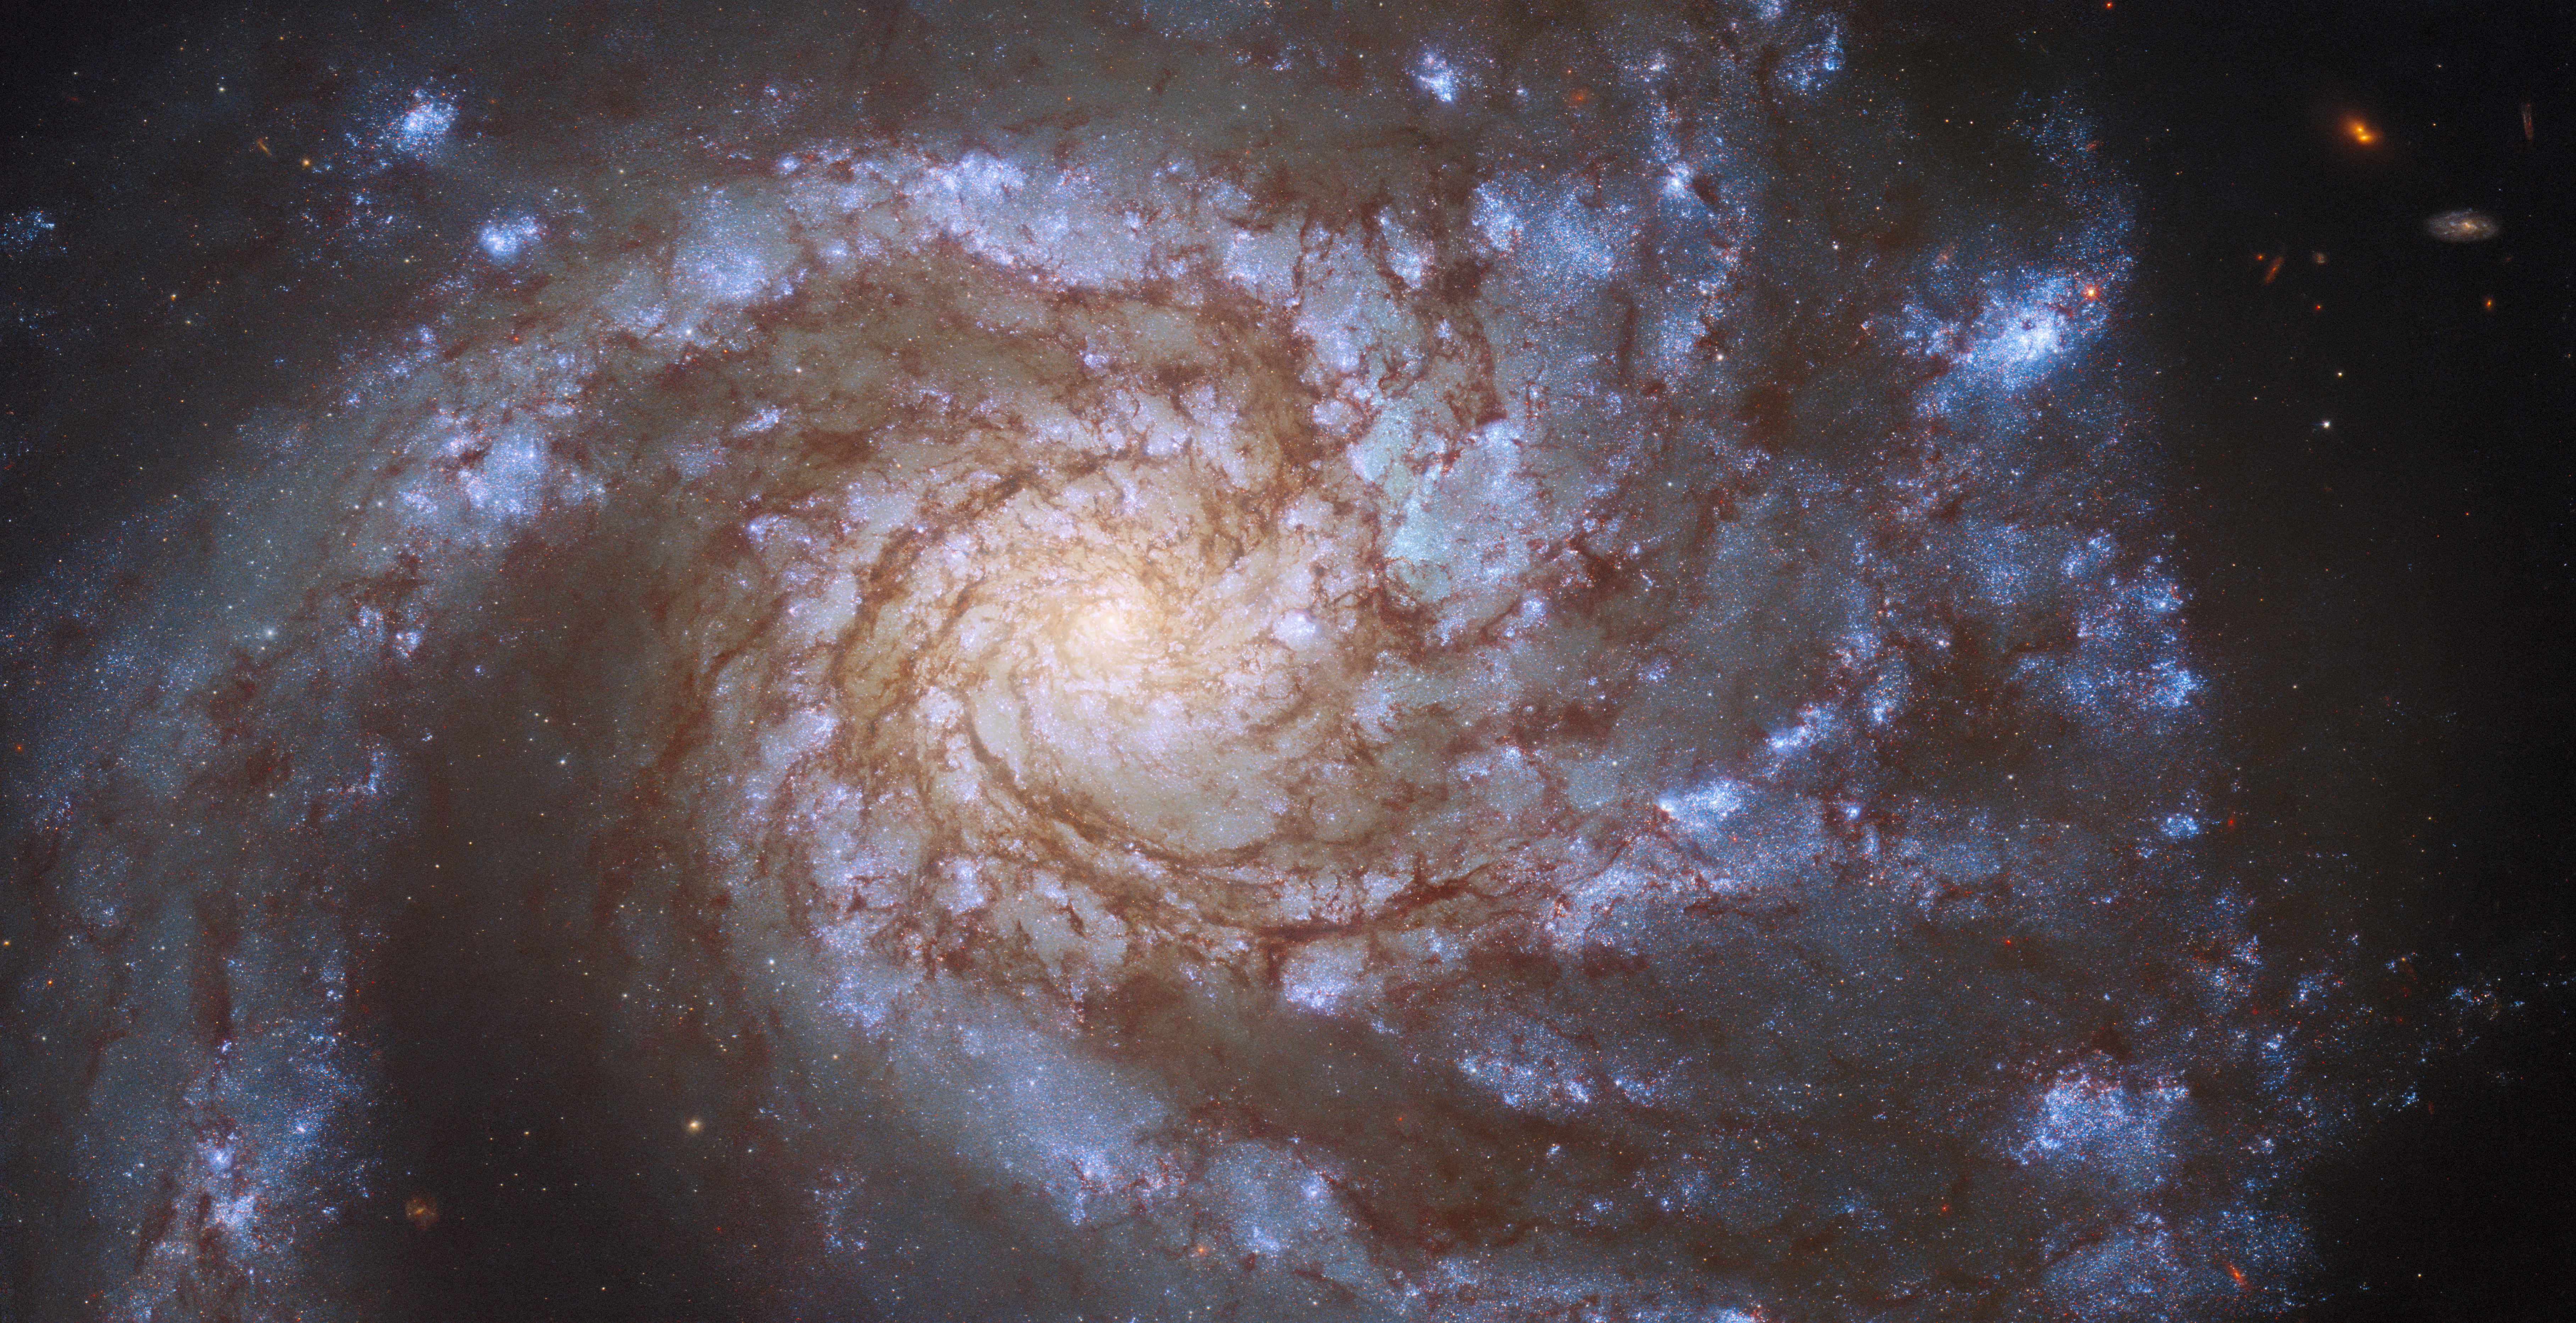

Hubble Sees Double in M99

The magnificent spiral galaxy M99 fills the frame in this image from the NASA/ESA Hubble Space Telescope. M99 — which lies roughly 42 million light-years from Earth in the constellation Coma Berenices — is a “grand design” spiral galaxy, so-called because of the well-defined, prominent spiral arms visible in this image. M99 was captured by Hubble’s Wide Field Camera 3 on two separate occasions, helping astronomers study two entirely different astronomical phenomena.

The first set of observations aimed to explore a gap between two different varieties of cosmic explosions; novae and supernovae. Novae, which are caused by the interactions between white dwarfs and larger stars in binary systems, are far less bright than the supernovae which mark the catastrophically violent deaths of massive stars. However, current astronomical theories predict that sudden, fleeting events could occur that shine with brightnesses between those of novae and supernovae. Despite being described by astronomers as being shrouded in mystery and controversy, just such an event was observed in M99. Astronomers turned to Hubble’s keen vision to take a closer look and precisely locate the fading source.

The second set of observations were part of a large Hubble project which aims to chart the connections between young stars and the clouds of cold gas from which they form. Hubble inspected 38 nearby galaxies, identifying clusters of hot, young stars. These galaxies were also observed by the Atacama Large Millimeter/submillimeter Array (ALMA), a colossal radio telescope consisting of 66 individual dishes perched high in the Chilean Andes. The combination of Hubble’s observations of young stars and ALMA’s insight into clouds of cold gas will allow astronomers to delve into the details of star formation, and paves the way for future science with the NASA/ESA/CSA James Webb Space Telescope.

Credit: ESA/Hubble & NASA, M. Kasliwal, J. Lee and the PHANGS-HST Team